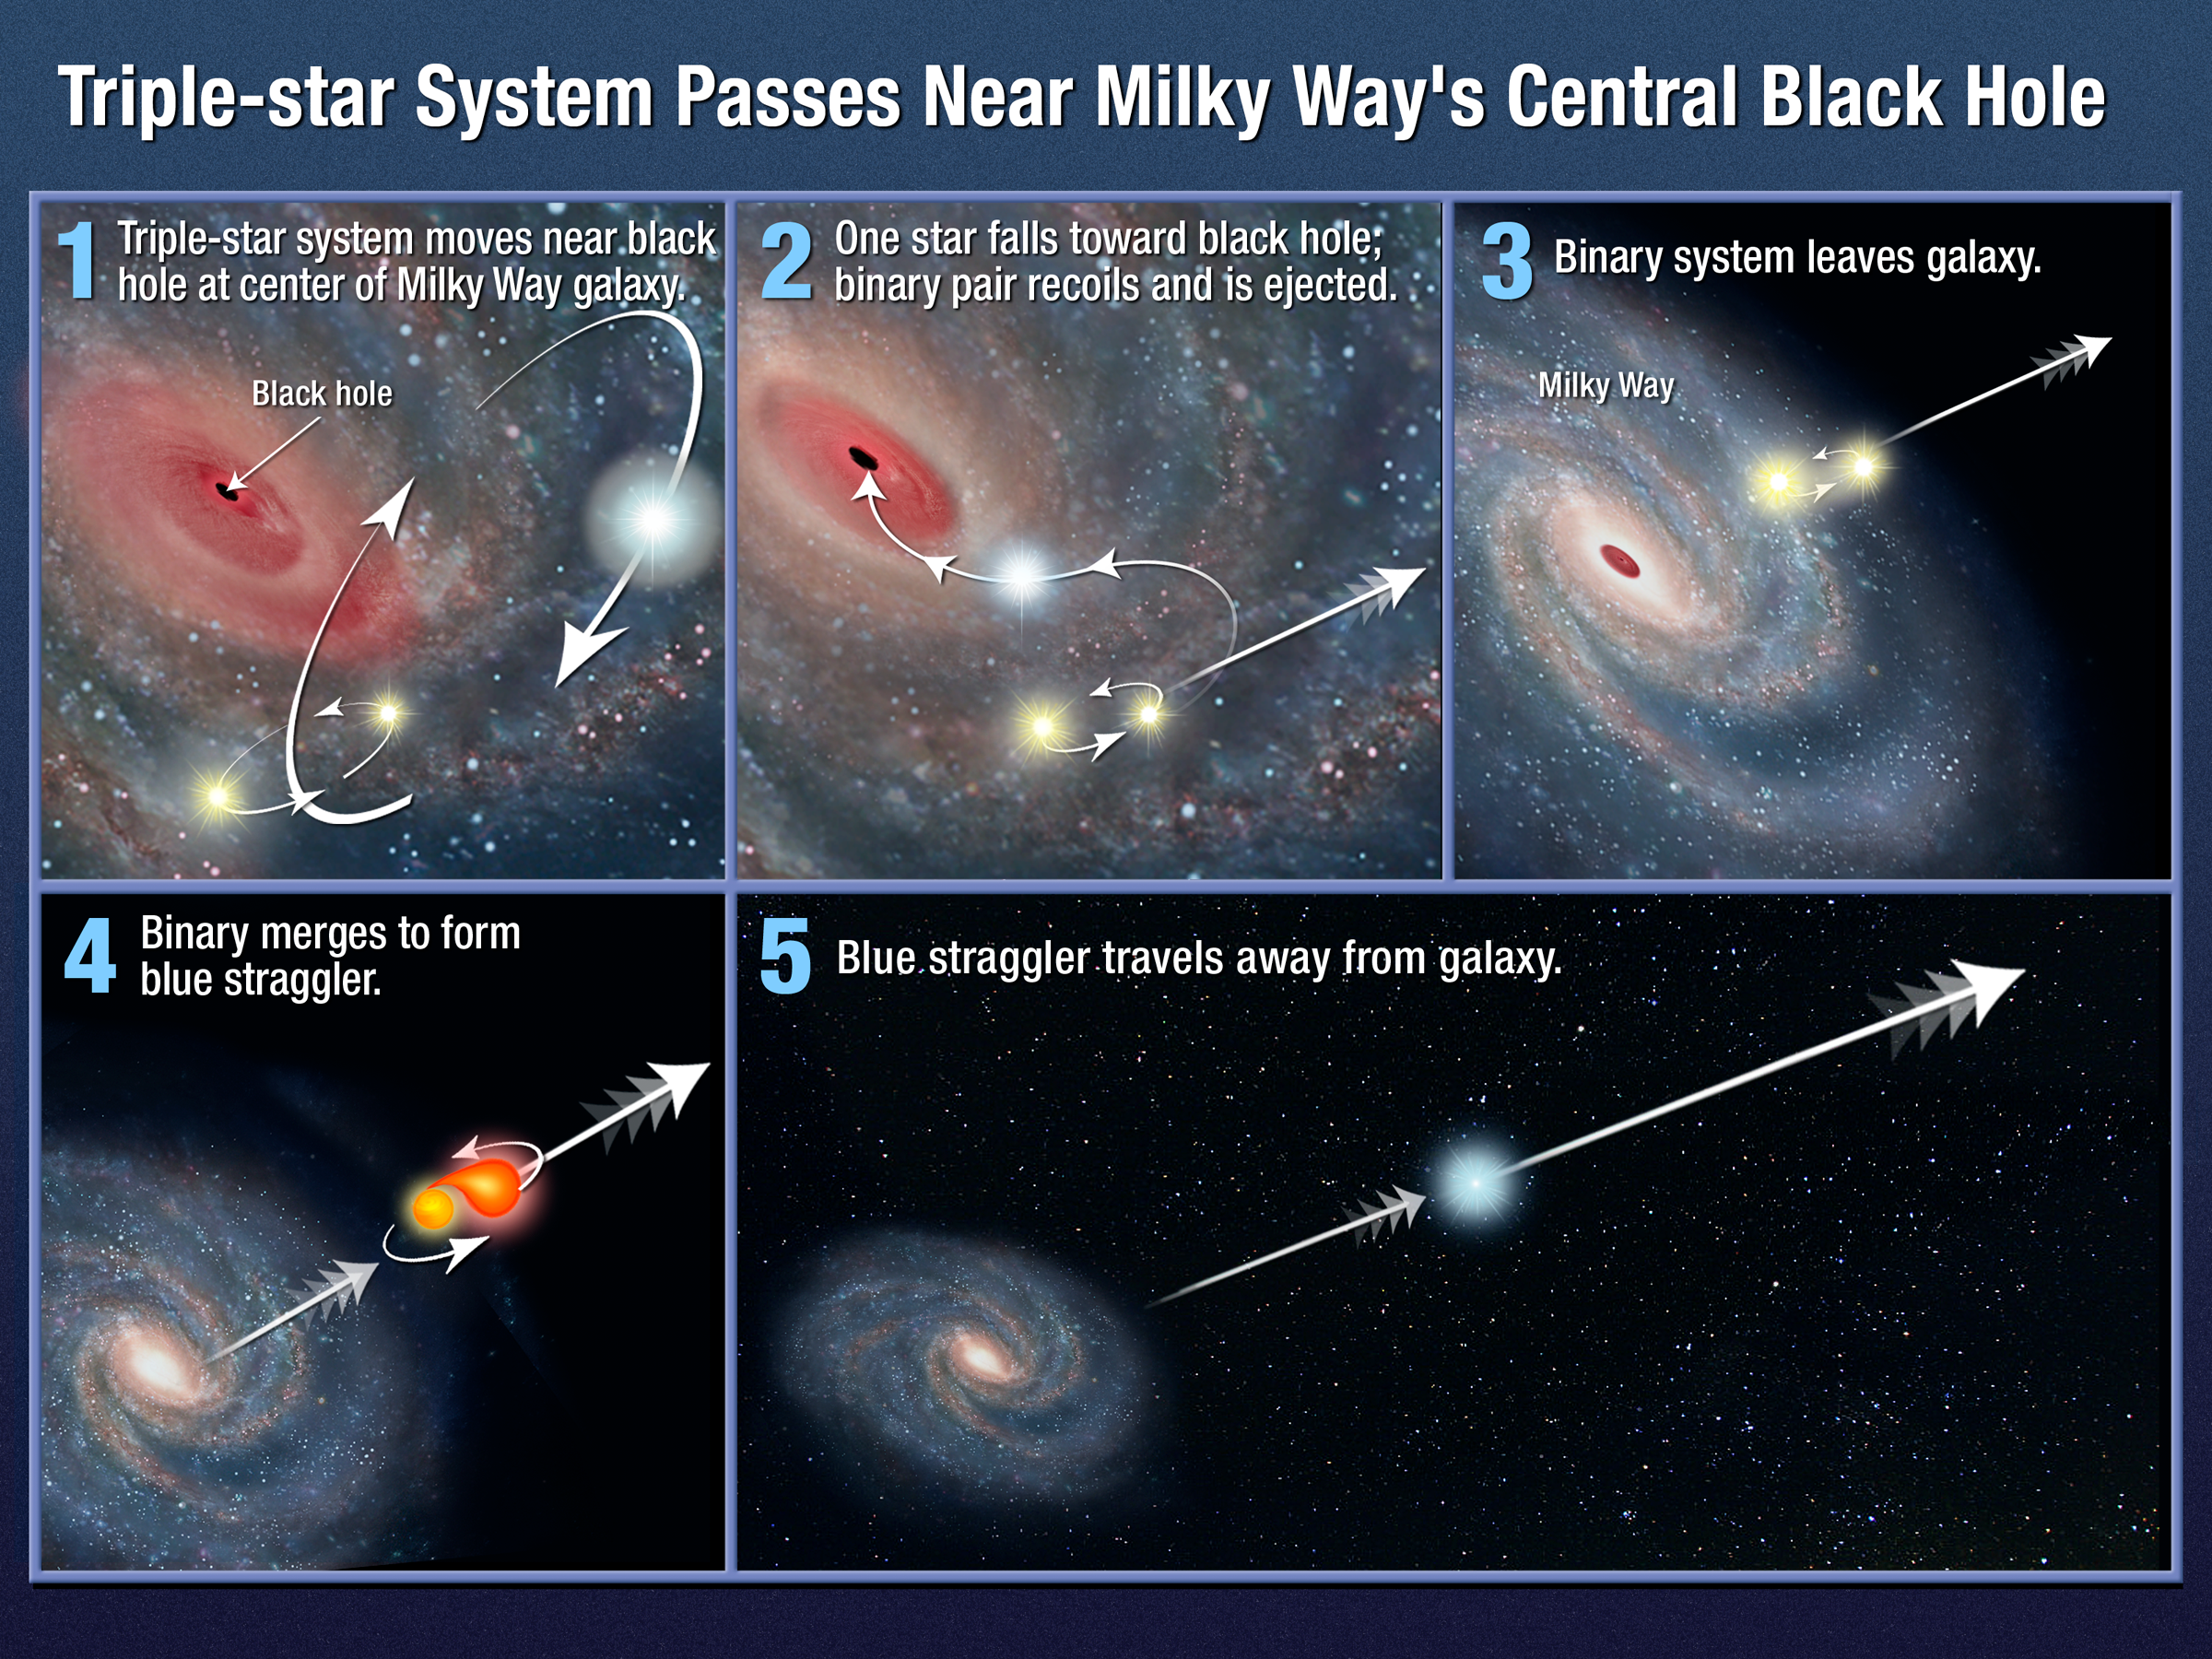

Triple-star system passes near Milky Way's central black hole

This illustration shows one possible mechanism for how the star HE 0437-5439 acquired enough energy to be ejected from our Milky Way galaxy.

In this scenario, a triple-star system, consisting of a close binary system and another outer member bound to the group, is orbiting near the galaxy's monster black hole. One star is captured by the black hole and the tightly bound pair gets ejected from the galaxy. As the duo speeds through the galaxy, one member evolves more quickly and consumes the other. The resulting rejuvenated star, massive and very blue, is called a blue straggler.

Credit: NASA, ESA, and A. Feild (STScI). Science Credit: NASA, ESA, O. Gnedin (University of Michigan, Ann Arbor, USA), and W. Brown (Harvard-Smithsonian Center for Astrophysics, Cambridge, Mass., USA)